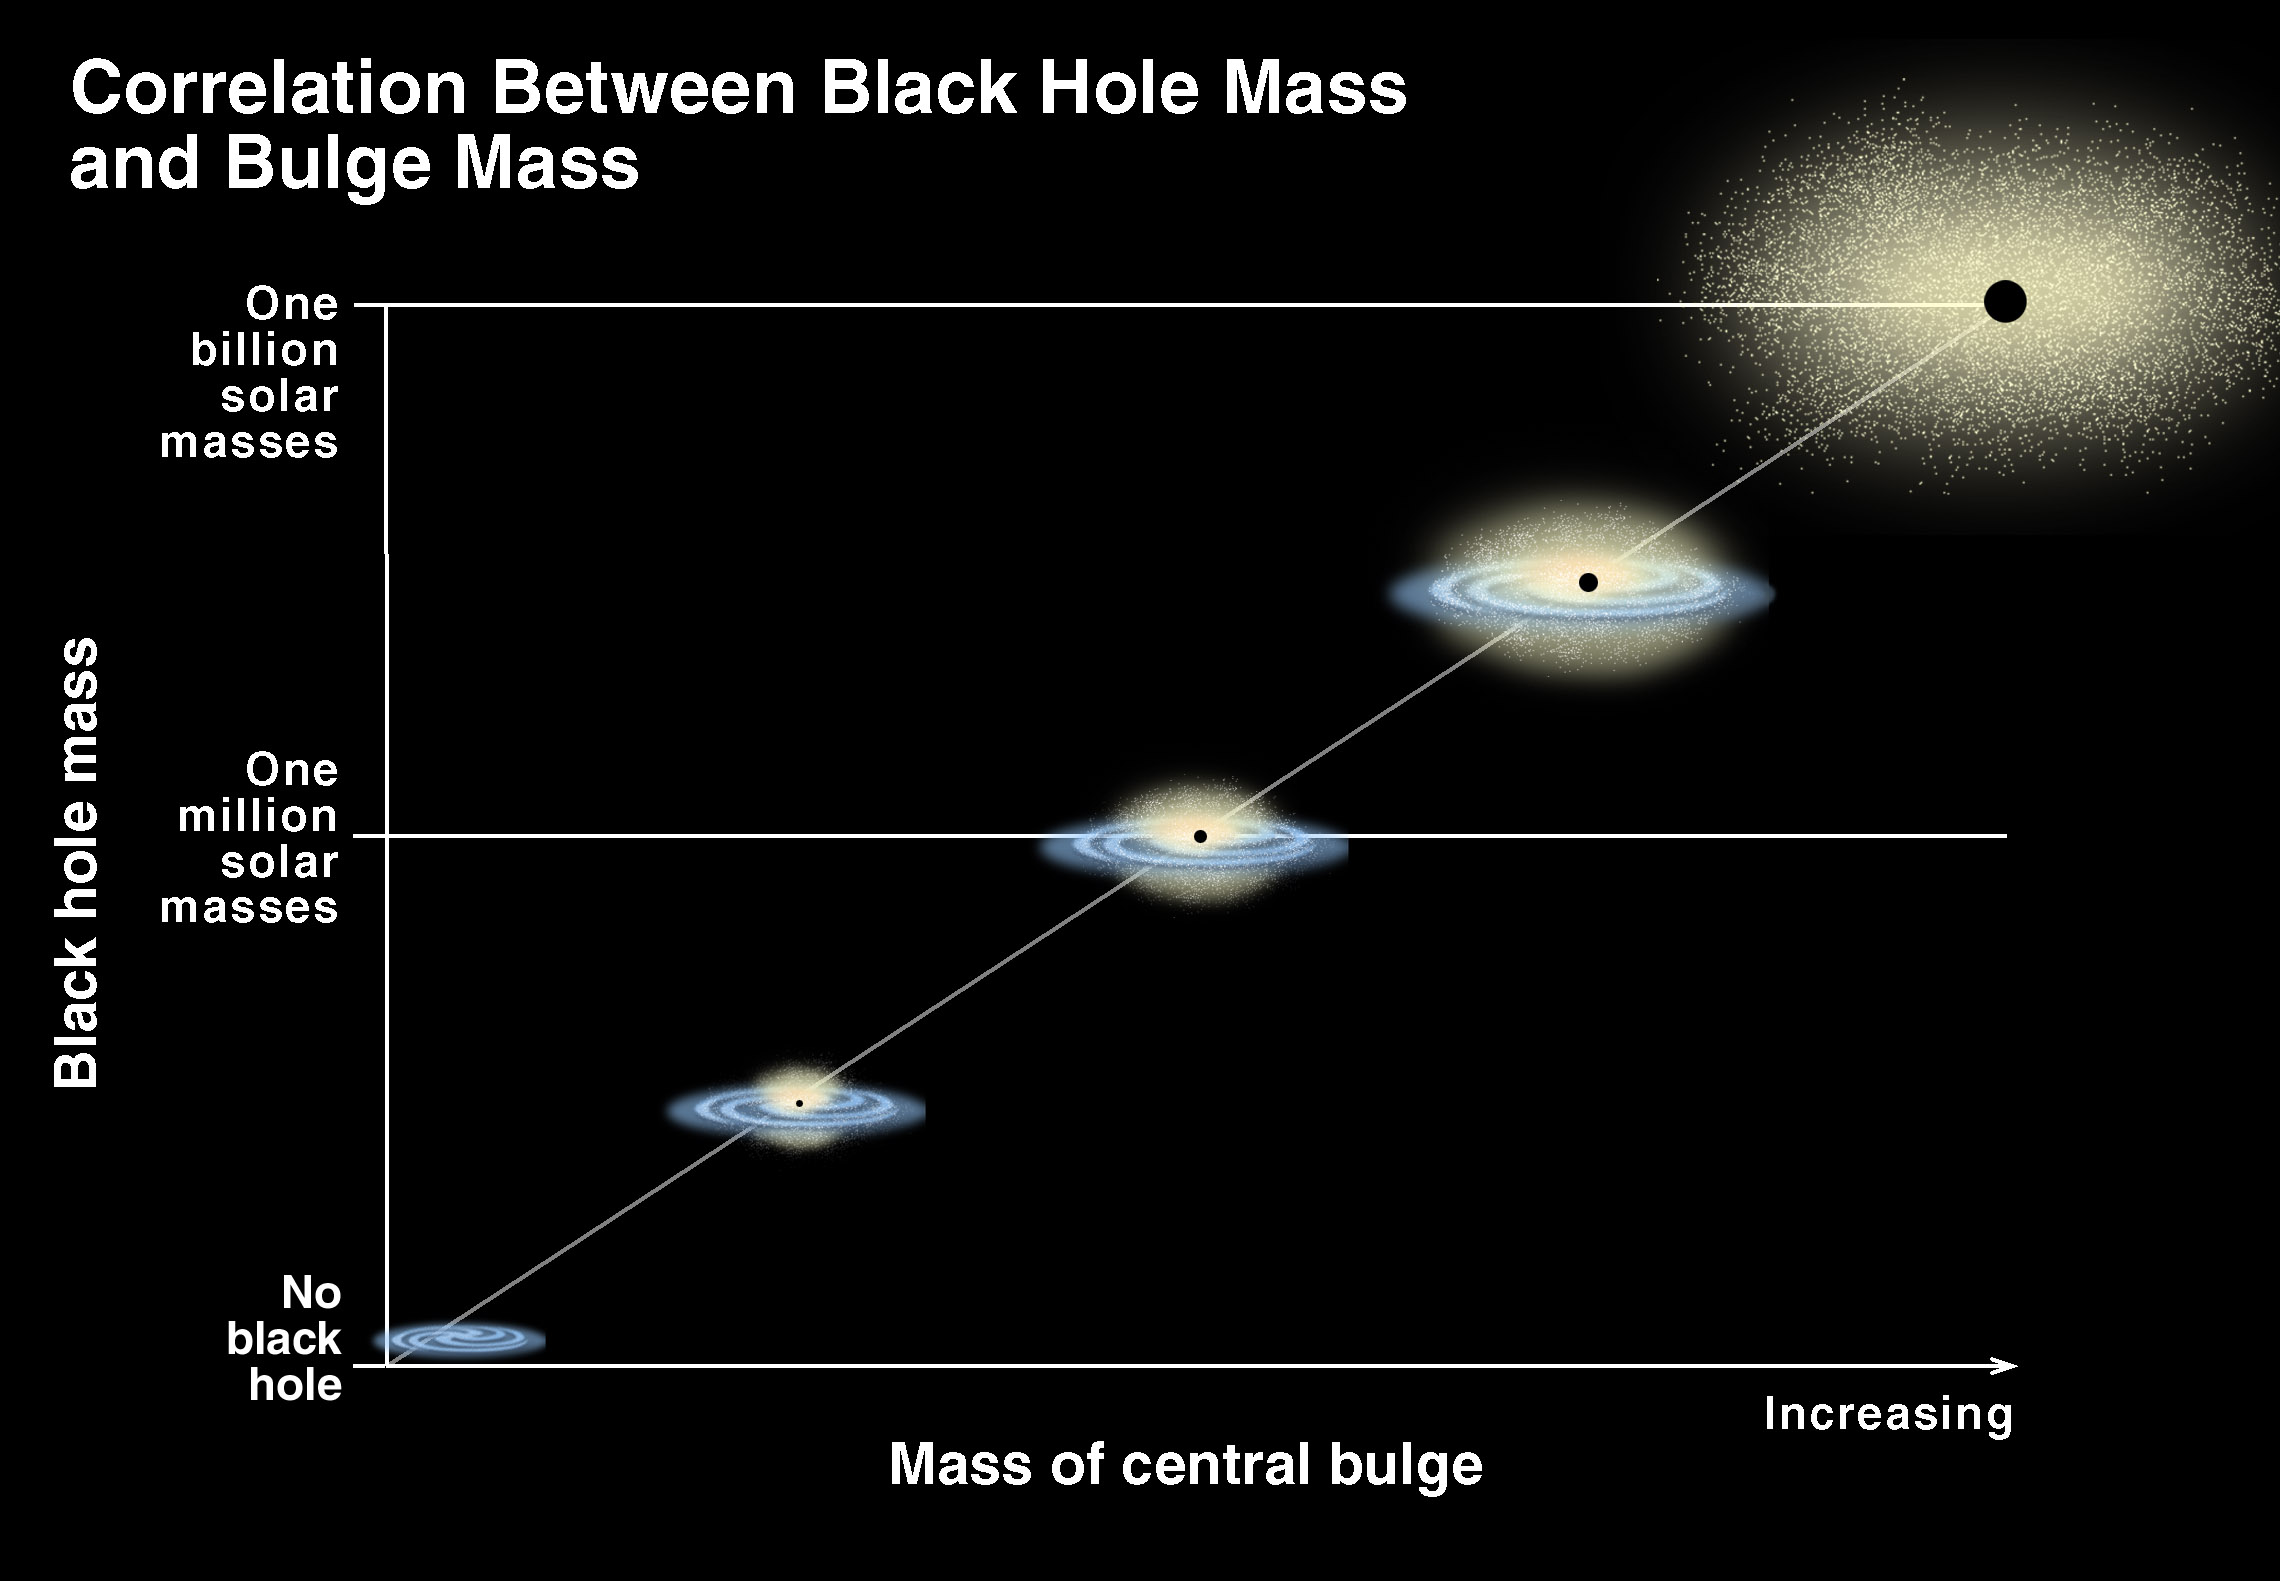

Correlation of black hole Mass and bulge mass/brightness

The results now show a close relationship between the black hole mass and the stars that comprise an elliptical galaxy or the central bulge stars of a spiral galaxy. But surprisingly, an even tighter correlation is found. 'Other observations of the entire stellar mass of the bulge show a very tight relationship between a black hole's mass and the depth of the gravitational potential well as measured by the magnitude of random velocities of stars in the galaxy's hub. This bolsters the conclusion that the mass correlation is real, ' says Gebhardt.

Credit: K. Cordes, S. Brown (STScI)